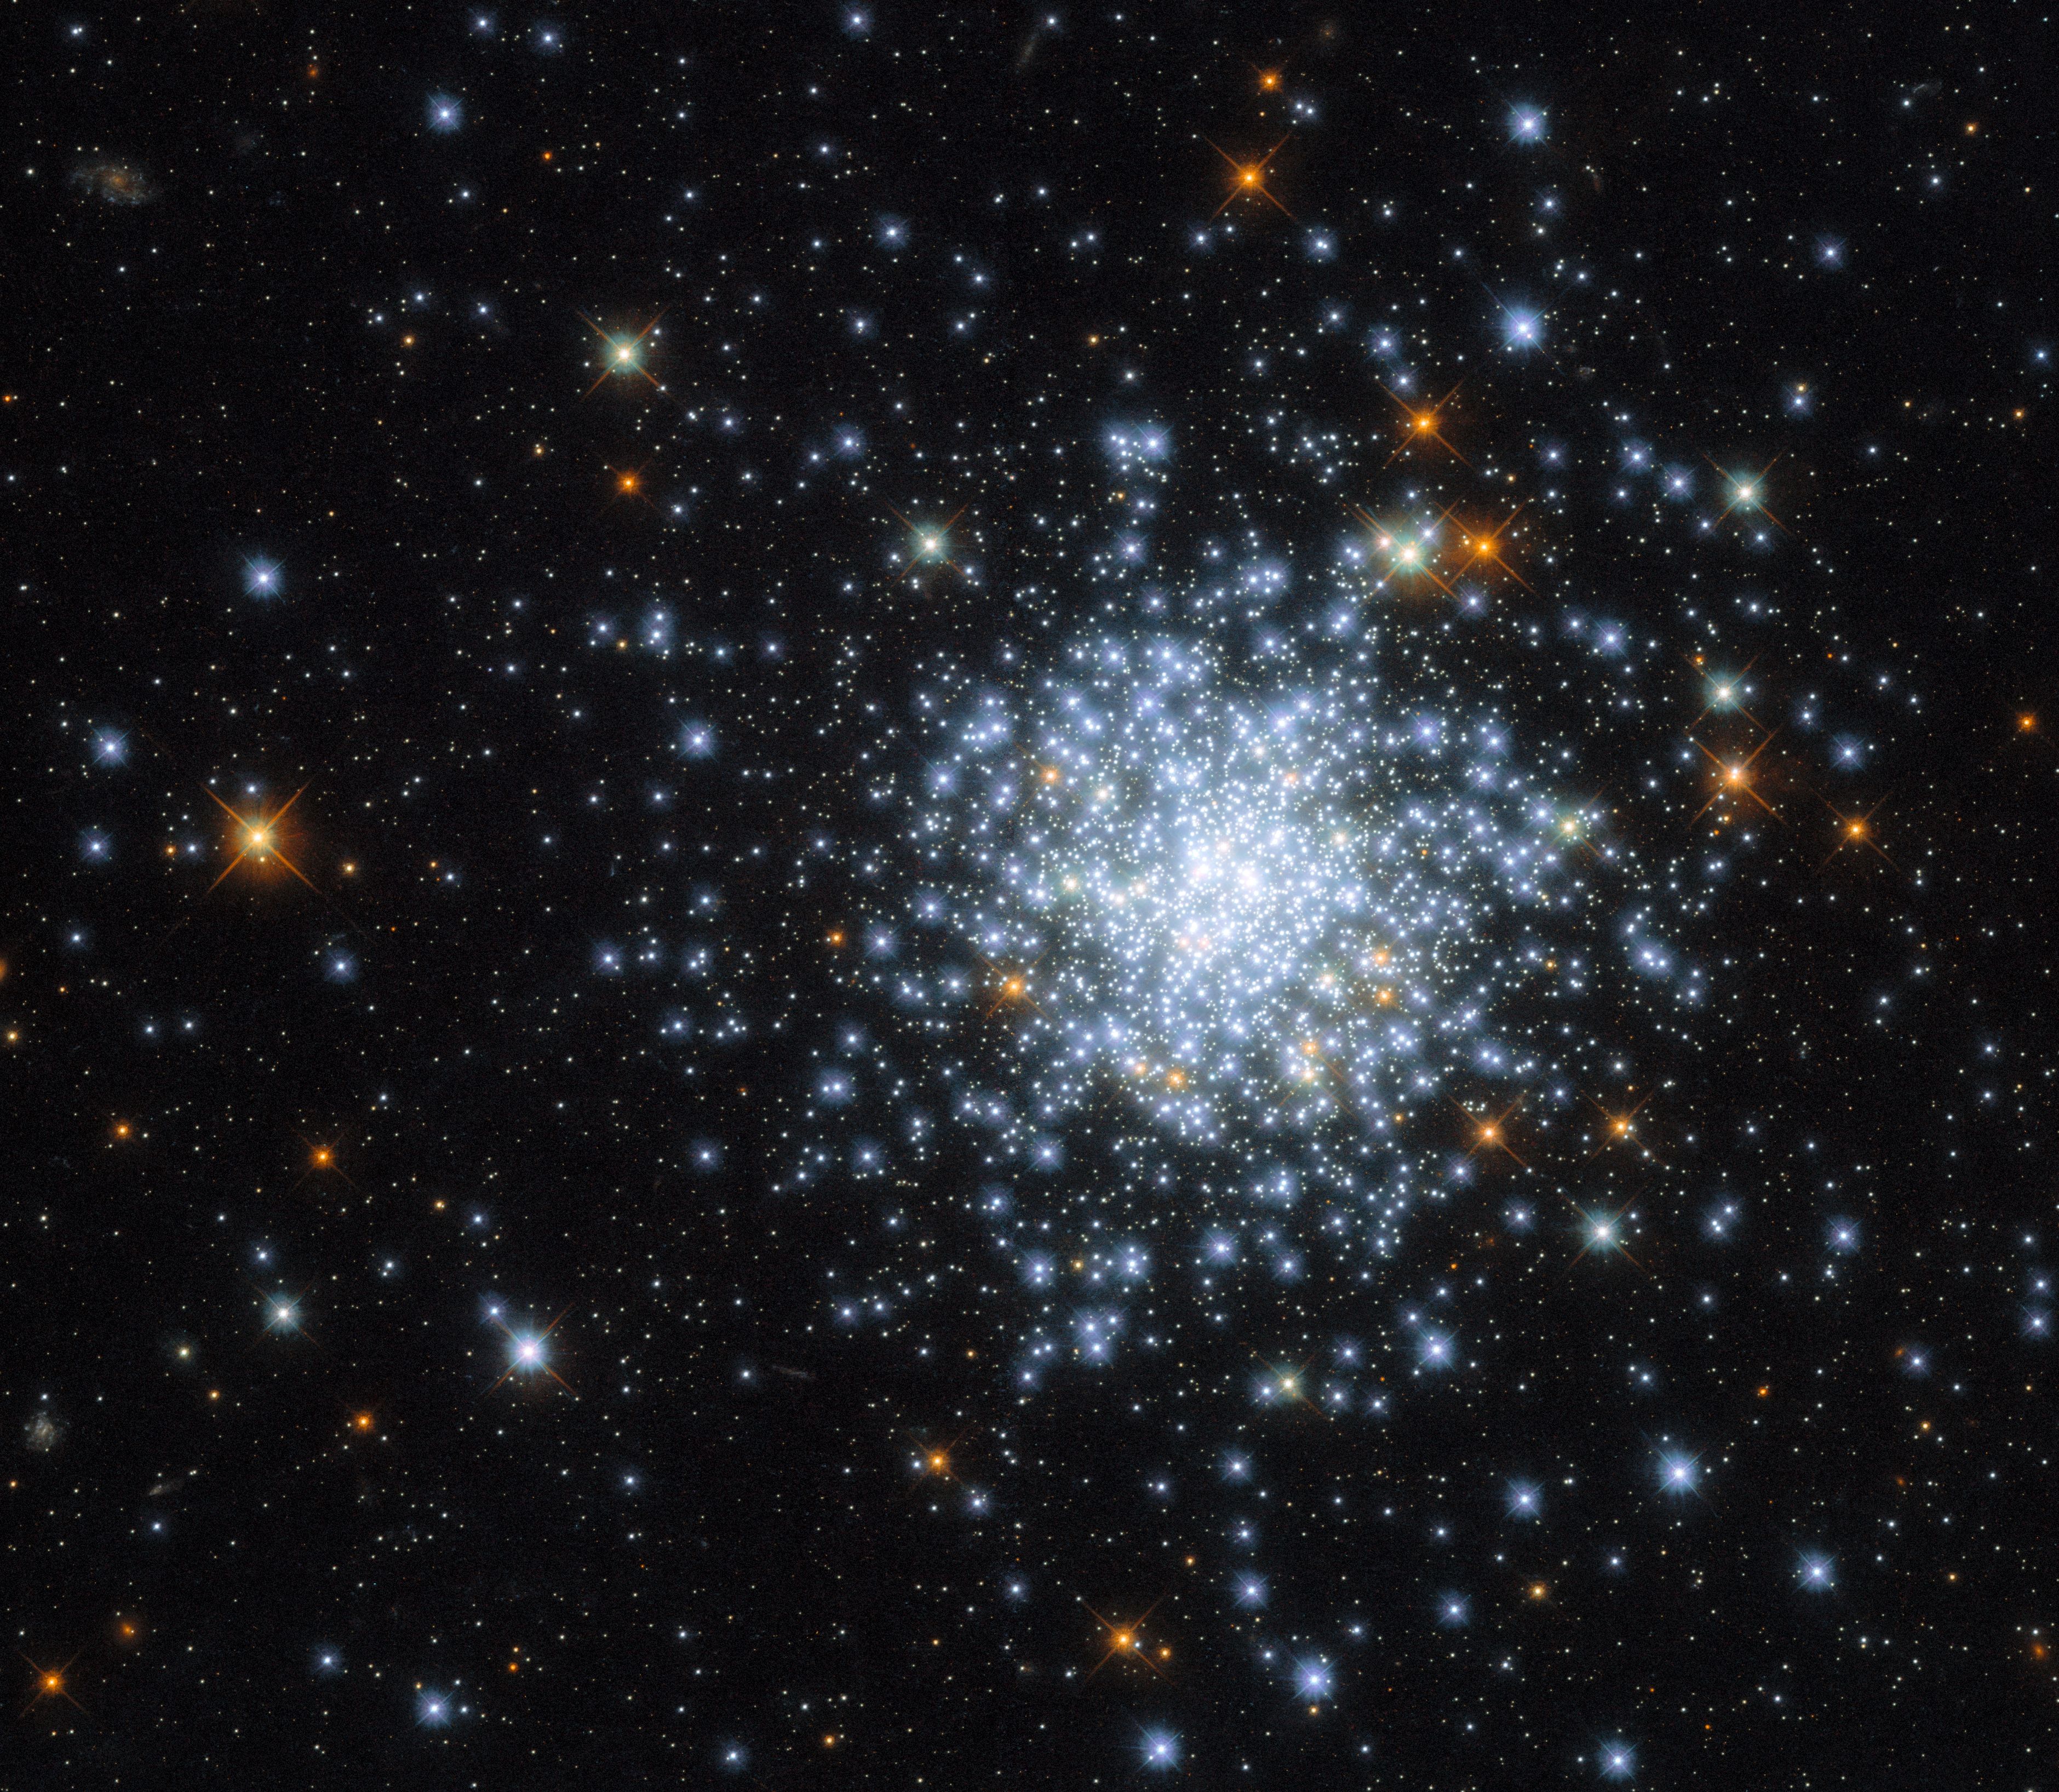

Cluster in the Cloud

This Picture of the Week shows an open cluster known as NGC 2164, which was first discovered in 1826 by a Scottish astronomer named James Dunlop. NGC 2164 is located within one of the Milky Way galaxy's closest neighbours — the satellite galaxy known as the Large Magellanic Cloud. The Large Magellanic cloud is a relatively small galaxy that lies about 160 000 light-years from Earth. It is considered a satellite galaxy because it is gravitationally bound to the Milky Way. In fact, the Large Magellanic cloud is on a very slow collision course with the Milky Way — it’s predicted that they will collide 2.4 billion years from now.

The Large Magellanic Cloud only contains about one hundredth as much mass as the Milky Way, but it still contains billions of stars. The open cluster NGC 2164 is in good company in the Large Magellanic Cloud — the satellite galaxy is home to roughly 700 open clusters, alongside about 60 globular clusters. This image of NGC 2164 was taken by the NASA/ESA Hubble Space Telescope’s Wide Field Camera 3 (WFC3), which has previously imaged many other open clusters, including NGC 330 and Messier 11.

Credit: ESA/Hubble & NASA, J. Kalirai, A. Milone